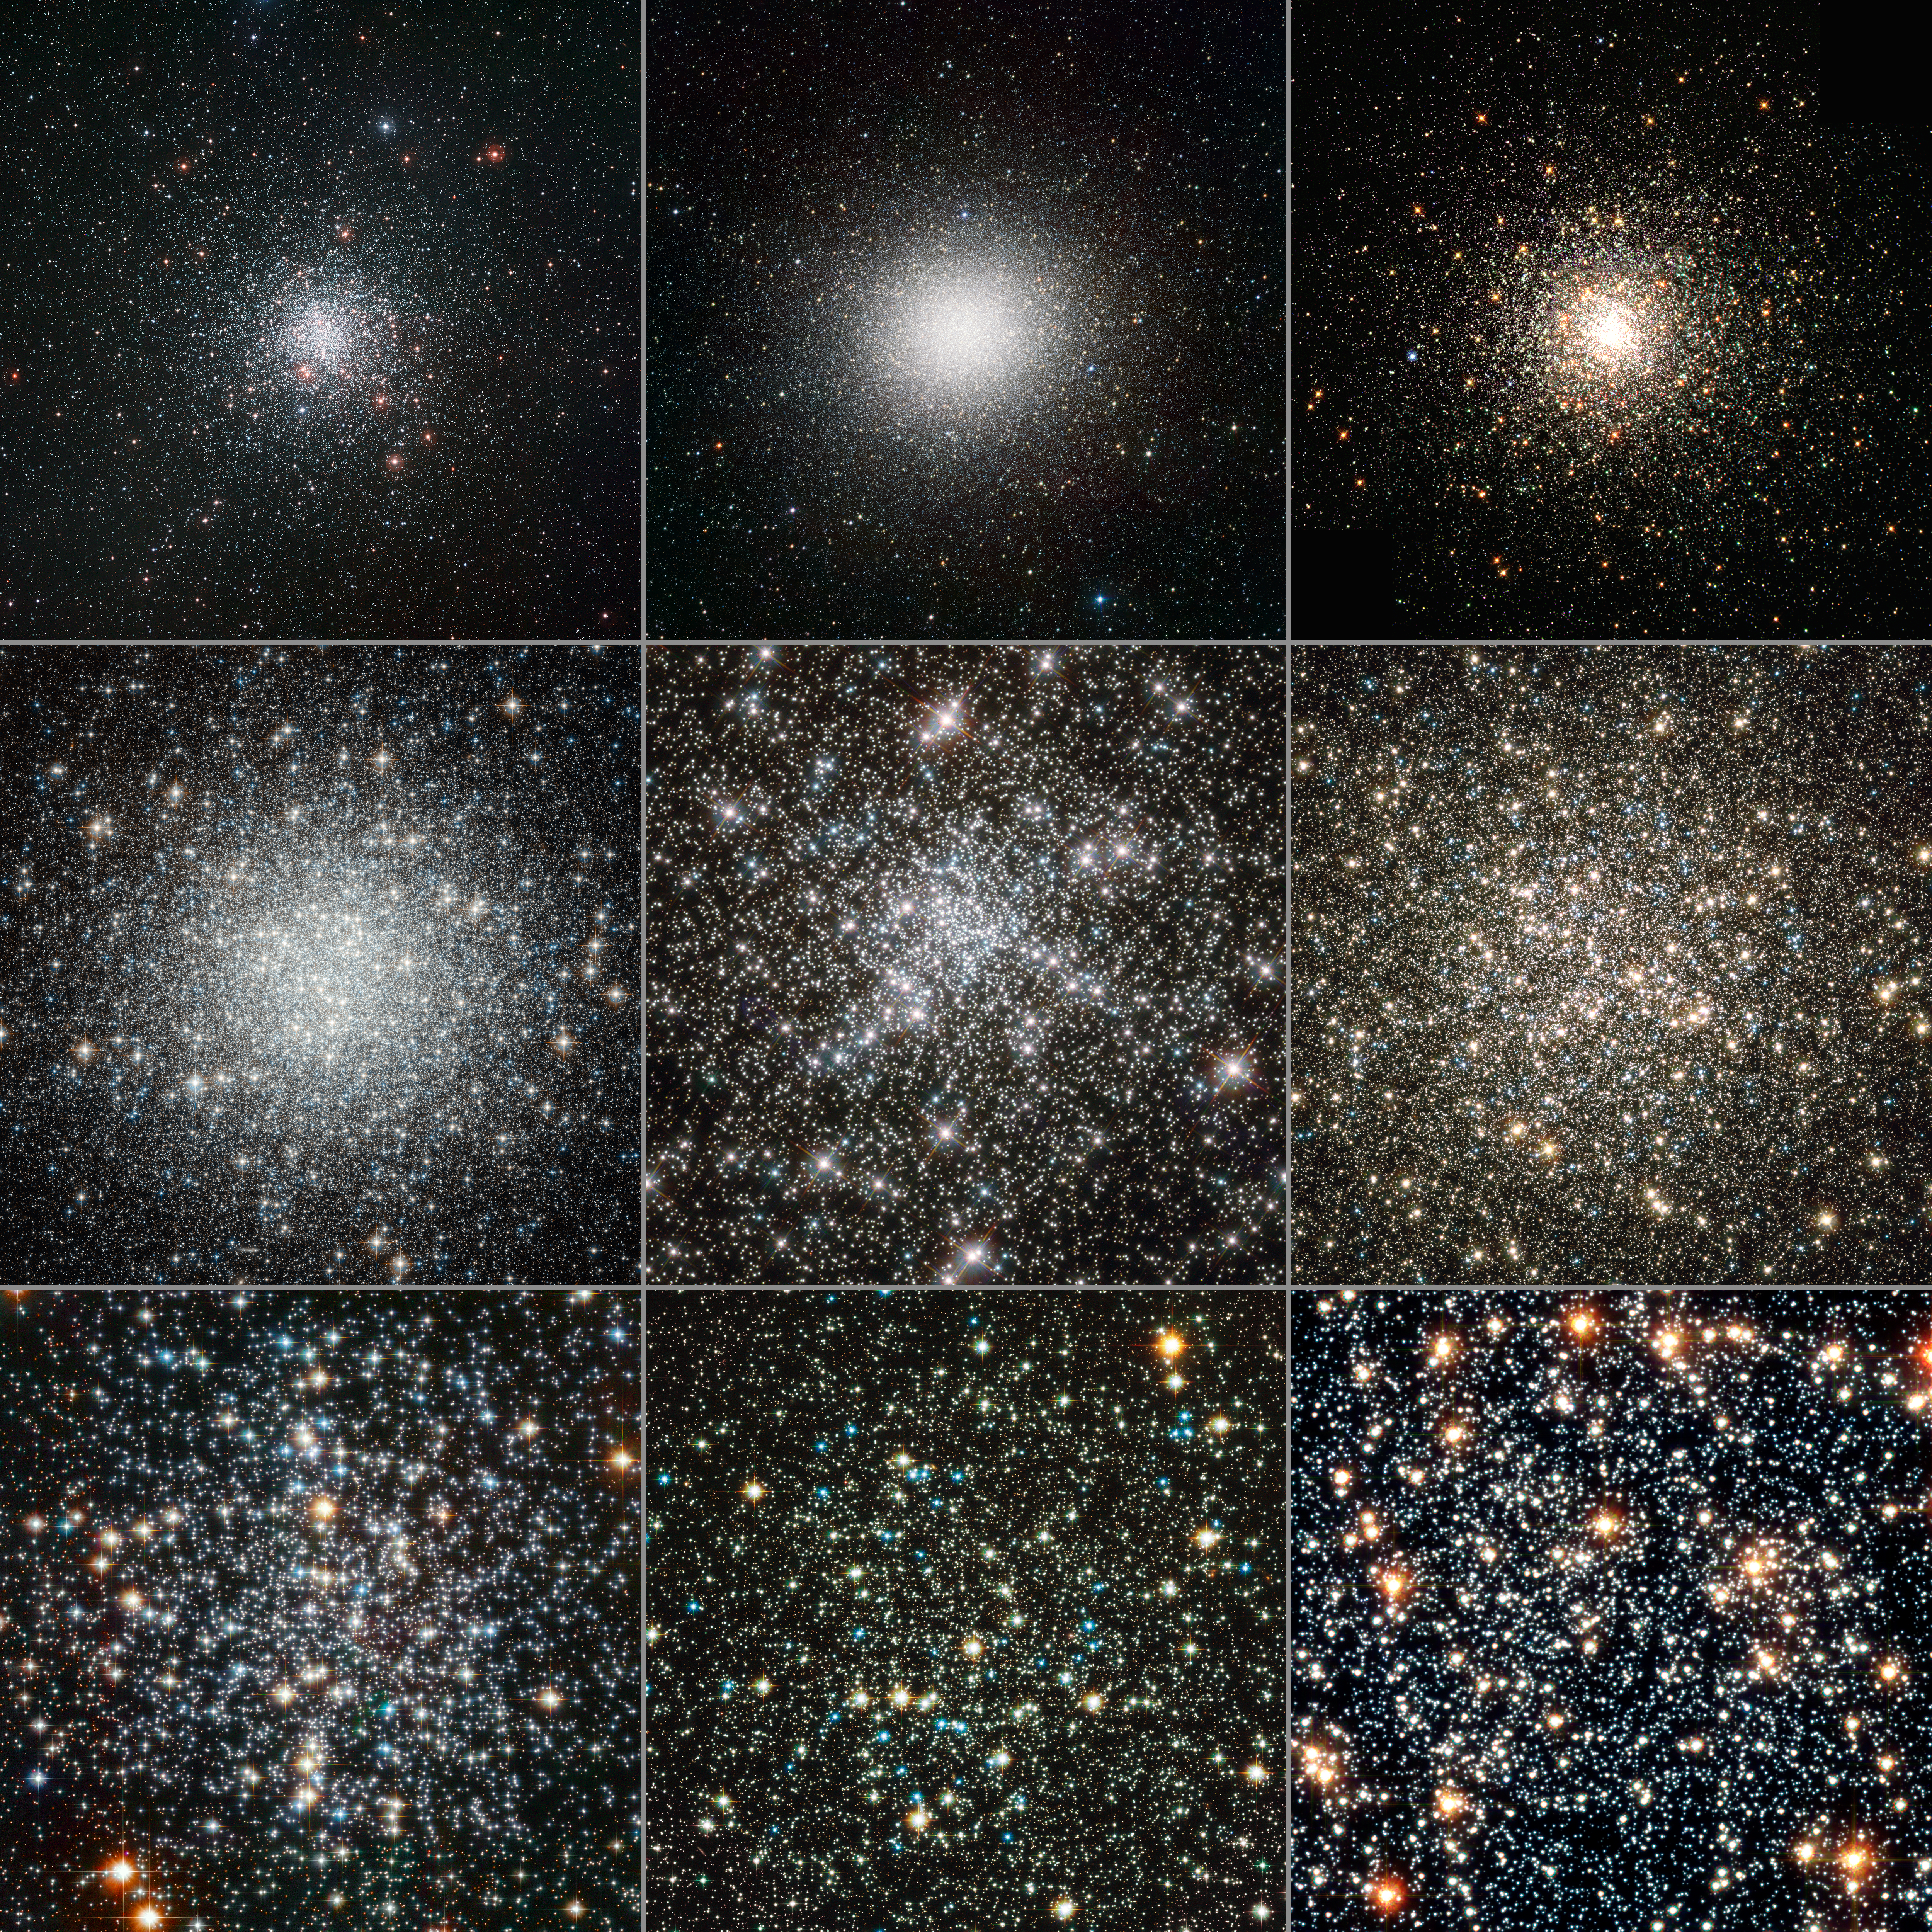

Globular clusters seen by Hubble and ESO

This collage shows a range of globular clusters, which were studied using Hubble and the MPG/ESO 2.2-metre telescope. The data show that, despite all forming at roughly the same time, the clusters have aged at dramatically different rates, with heavier stars sinking to the centres of the clusters in a process similar to sedimentation.

Top row: M 4 (ESO), Omega Cen (ESO), M 80 (Hubble)
Middle row: M 53 (Hubble), NGC 6752 (Hubble), M 13 (Hubble)
Bottom row: M 4 (Hubble), NGC 288 (Hubble), 47 Tuc (Hubble)

Credit: M 4: ESO. Omega Cen: ESO/INAF-VST/OmegaCAM. M 80: The Hubble Heritage Team (AURA/STScI/NASA/ESA). M 53: ESA/Hubble & NASA. NGC 6752: ESA/Hubble & NASA. M 13: NASA, ESA, and the Hubble Heritage Team (STScI/AURA). M 4: ESA/Hubble & NASA. NGC 288: ESA/Hubble & NASA. 47 Tuc: NASA, ESA, and G. Meylan (École Polytechnique Federale de Lausanne).